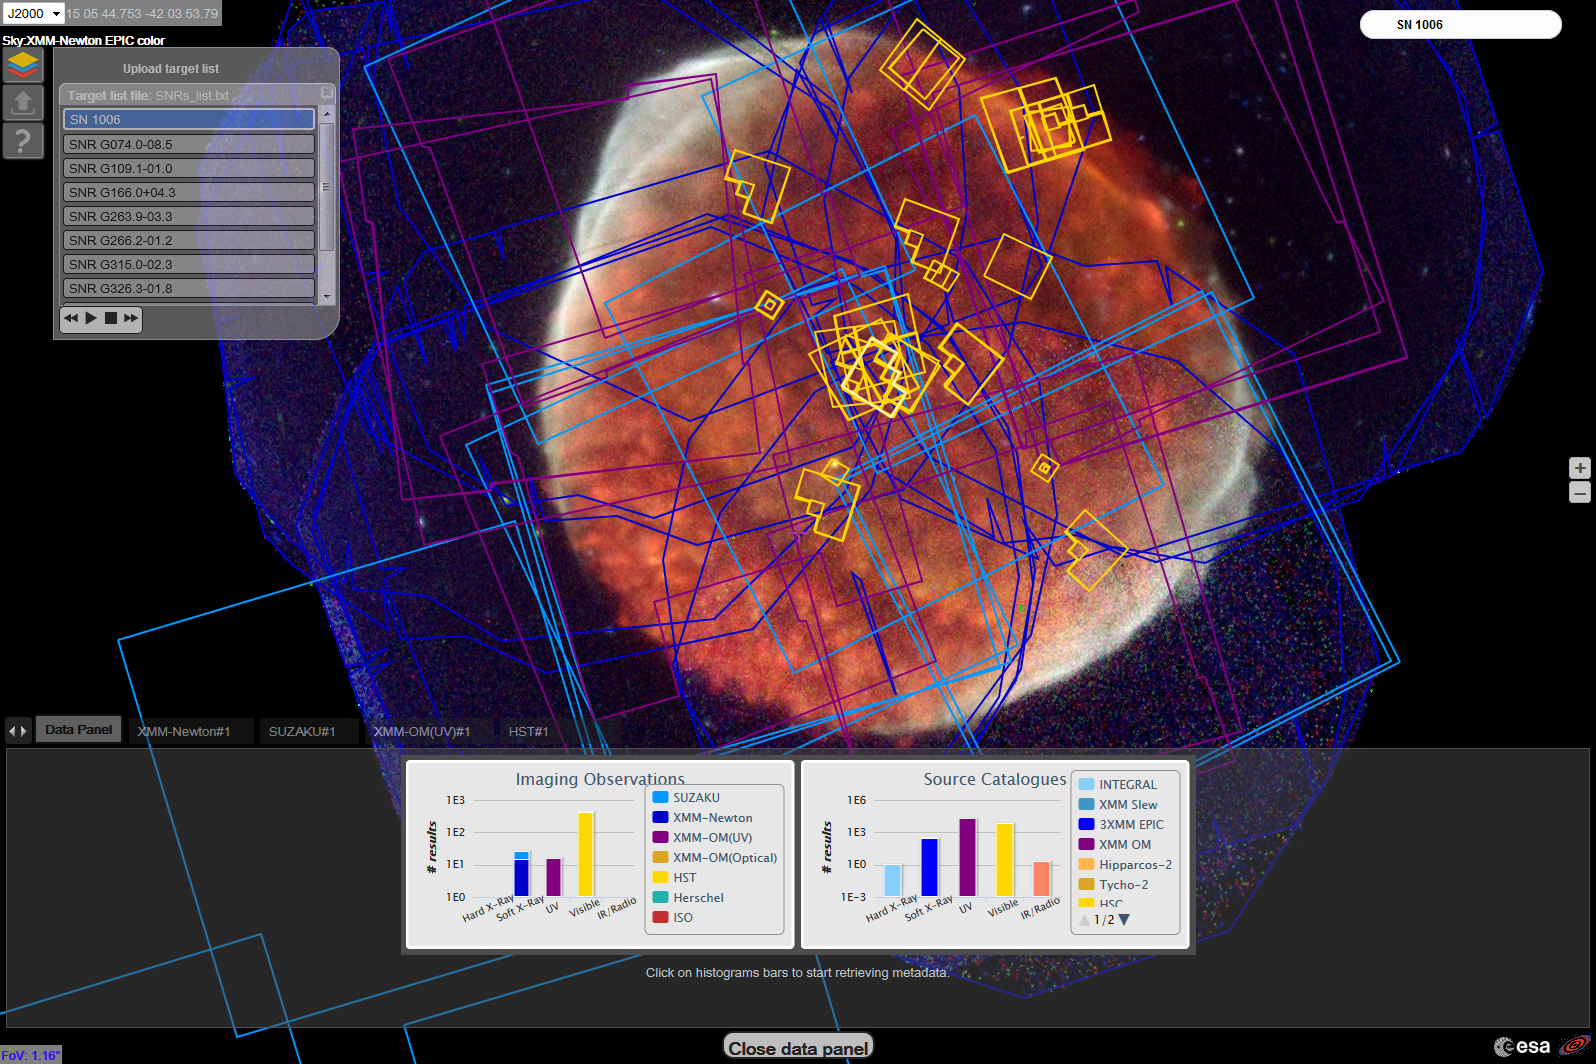

ESASky web application

A screenshot of the ESASky web application. The background is the remnant of SN1006 as seen by XMM-Newton, while the colourful boxes in the foreground mark the footprints of the available observations in this region of the sky. The Hubble footprints are clearly visible in yellow.

Credit: ESA/Hubble, ESASky